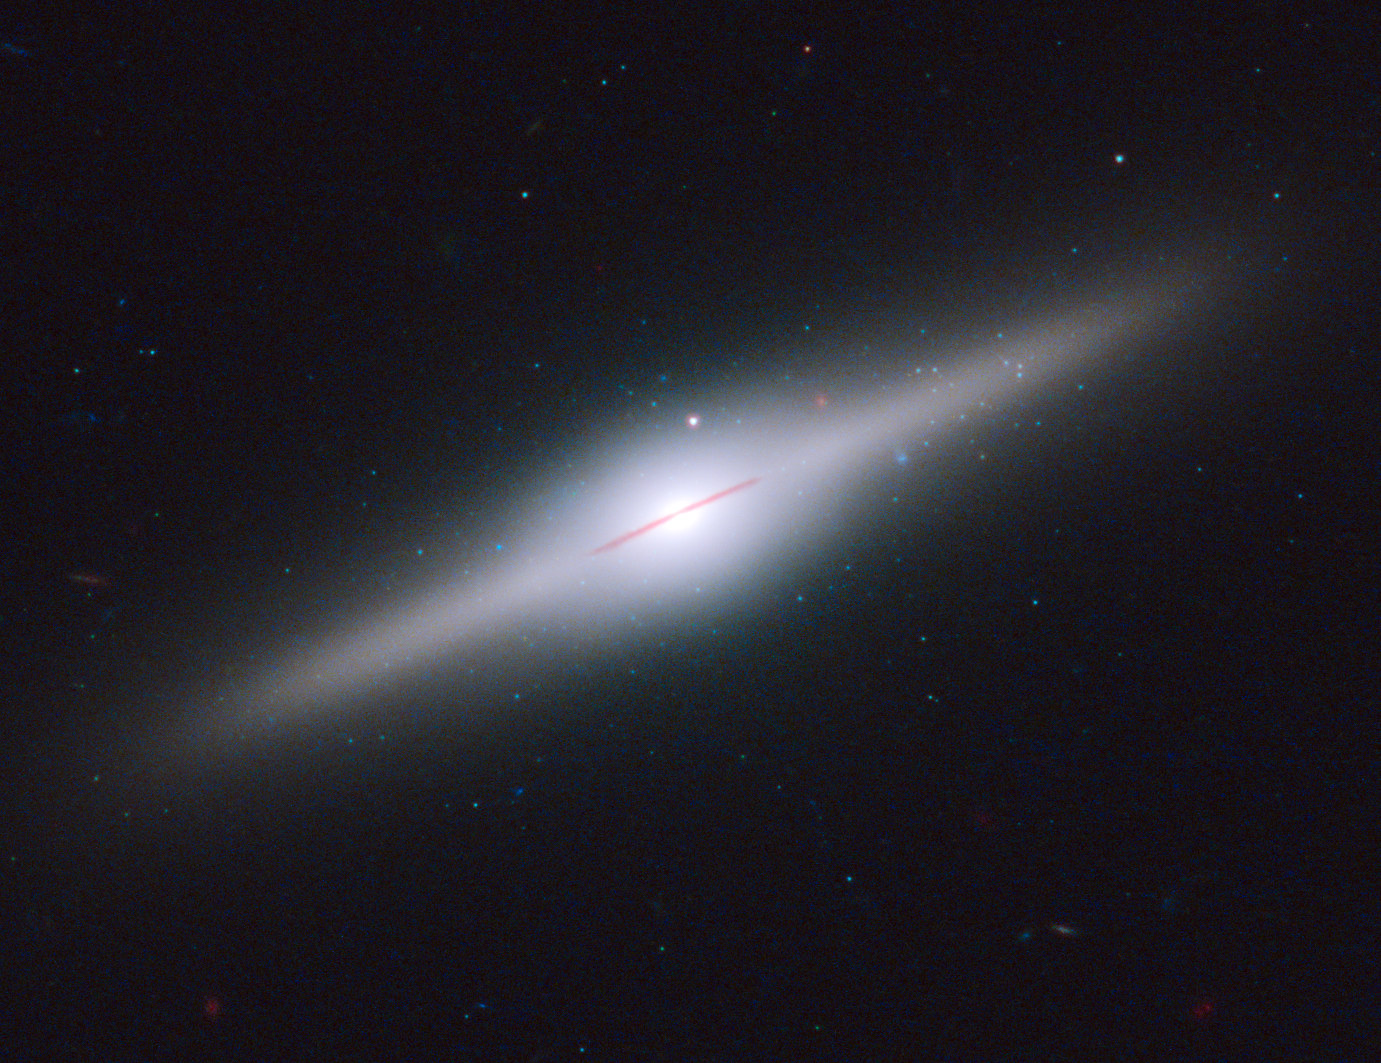

Star cluster surrounds wayward black hole in cannibal galaxy ESO 243-49 (unlabelled)

This spectacular edge-on galaxy, called ESO 243-49, is home to an intermediate-mass black hole that may have been purloined from a cannibalised dwarf galaxy. The black hole, with an estimated mass of 50 million Suns, lies above the galactic plane. This is an unlikely place for such a massive back hole to exist, unless it belonged to a small galaxy that was gravitationally torn apart by ESO 243-49.

Credit: NASA, ESA, and S. Farrell (University of Sydney, Australia and University of Leicester, UK)